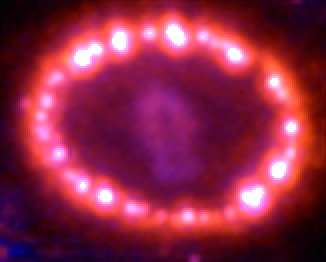

Supernova 1987A: December 12, 2004

This Hubble telescope image shows the supernova's triple-ring system, including the bright spots along the inner ring of gas surrounding the exploded star. A shock wave of material unleashed by the stellar blast is slamming into regions along the inner ring, heating them up, and causing them to glow. The ring, about a light-year across, was probably shed by the star about 20 000 years before it exploded.

Credit: NASA, ESA, and R. Kirshner (Harvard-Smithsonian Center for Astrophysics)